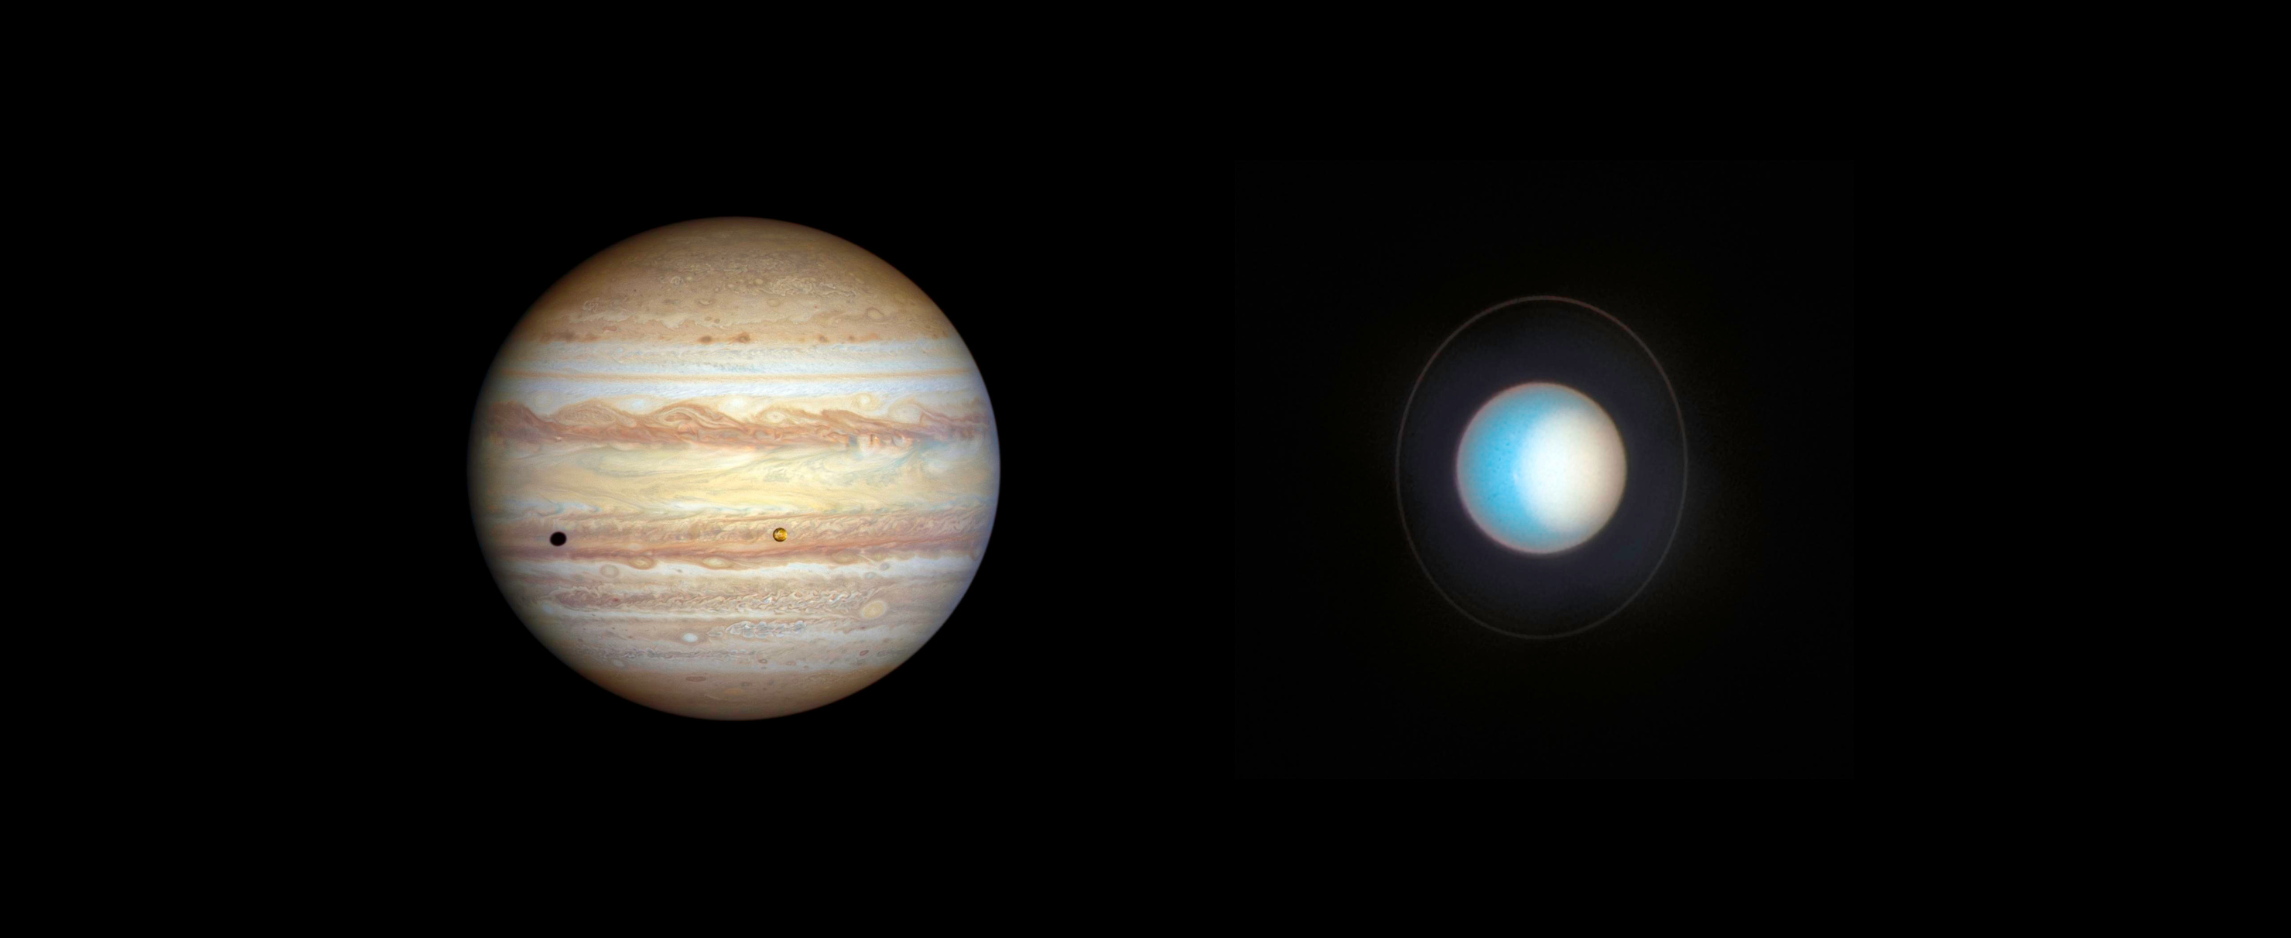

Hubble’s new views of Jupiter and Uranus

[Jupiter: left] - The forecast for Jupiter is for stormy weather at low northern latitudes. A prominent string of alternating storms is visible, forming a ‘vortex street’ as some planetary astronomers call it. This is a wave pattern of nested cyclones and anticyclones, locked together like the alternating gears of a machine moving clockwise and counterclockwise. If the storms get close enough to each other and merge together, they could build an even larger storm, potentially rivalling the current size of the Great Red Spot. The staggered pattern of cyclones and anticyclones prevents individual storms from merging. Activity is also seen interior to these storms; in the 1990s Hubble didn’t see any cyclones or anticyclones with built-in thunderstorms, but these storms have sprung up in the last decade. Strong colour differences indicate that Hubble is seeing different cloud heights and depths as well.

The orange moon Io photobombs this view of Jupiter’s multicoloured cloud tops, casting a shadow toward the planet’s western limb. Hubble’s resolution is so sharp that it can see Io’s mottled-orange appearance, the result of its numerous active volcanoes. These volcanoes were first discovered when the Voyager 1 spacecraft flew by in 1979. The moon’s molten interior is overlaid by a thin crust through which the volcanoes eject material. Sulphur takes on various hues at different temperatures, which is why Io’s surface is so colourful. This image was taken on 12 November 2022.

[Uranus: right] - Uranus’s north pole shows a thickened photochemical haze that looks similar to the smog over cities. Several little storms can be seen near the edge of the polar haze boundary. Hubble has been tracking the size and brightness of the north polar cap and it continues to get brighter year after year. Astronomers are disentangling multiple effects — from atmospheric circulation, particle properties, and chemical processes — that control how the atmospheric polar cap changes with the seasons. At the Uranian equinox in 2007, neither pole was particularly bright. As the northern summer solstice approaches in 2028 the cap may grow brighter still, and will be aimed directly toward Earth, allowing good views of the rings and the north pole; the ring system will then appear face-on. This image was taken on 10 November 2022.

Note: The planets do not appear in this image to scale.

Credit: NASA, ESA, STScI, A. Simon (NASA-GSFC), M. H. Wong (UC Berkeley), J. DePasquale (STScI)